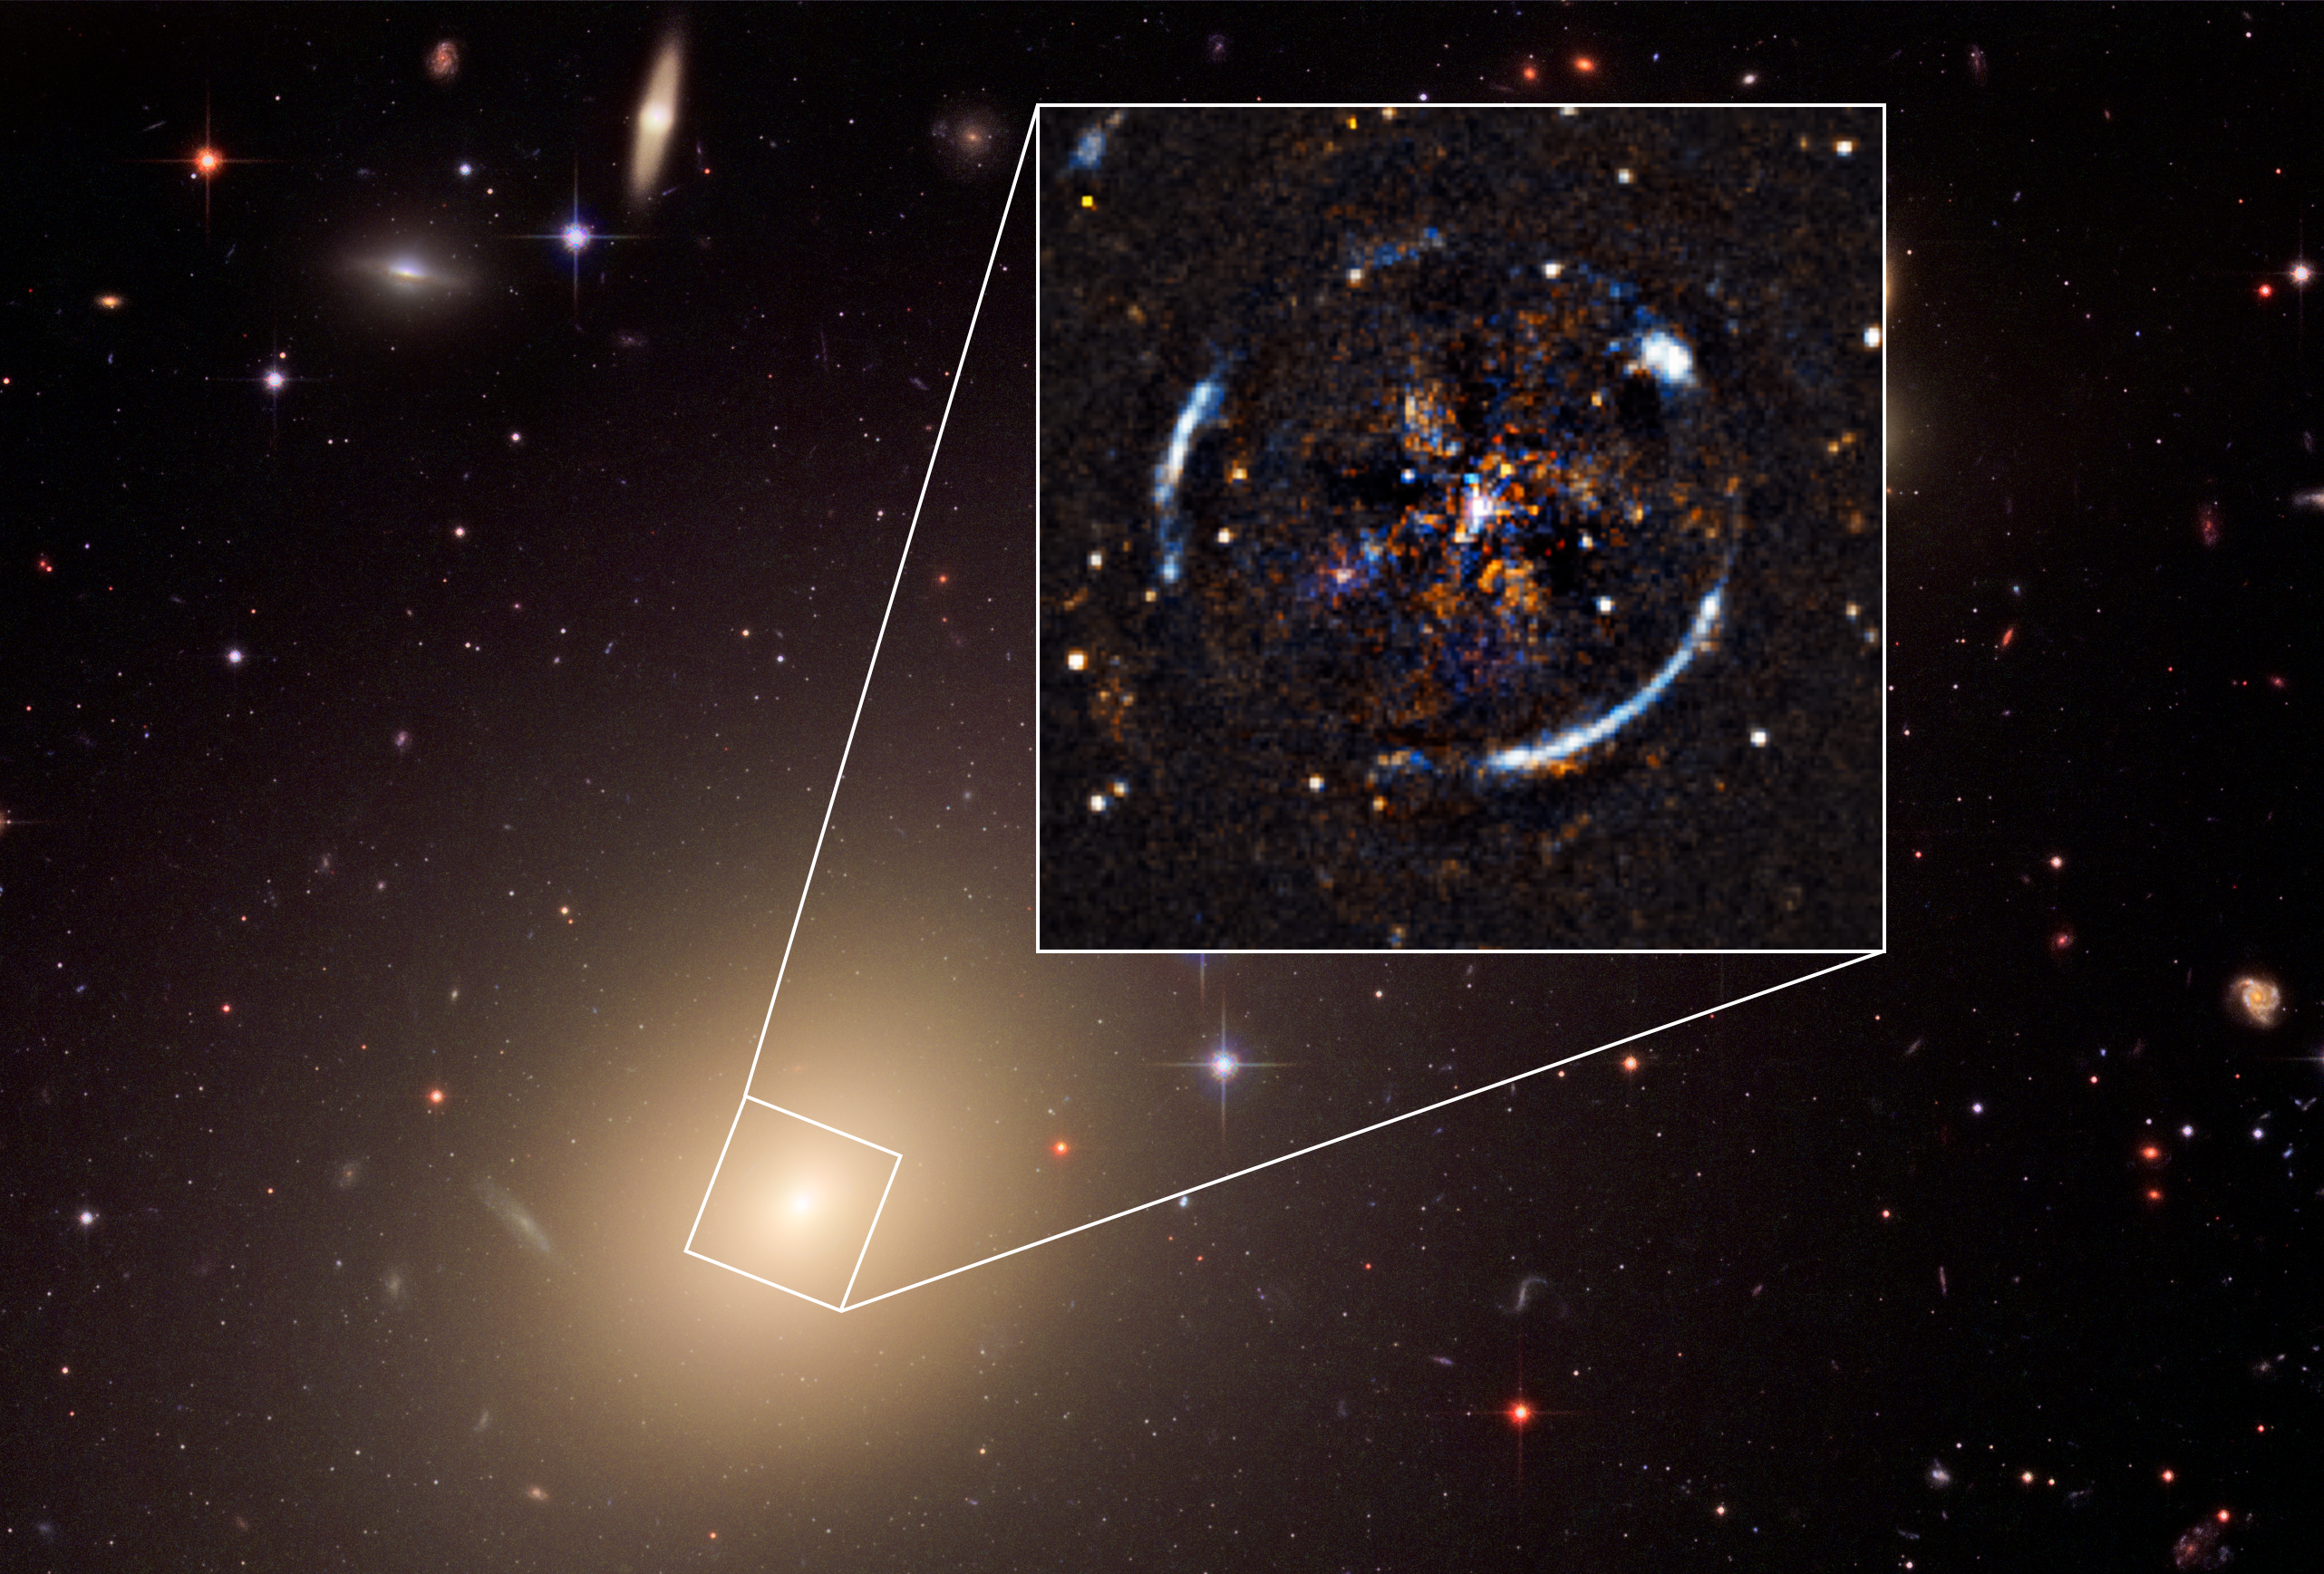

Image of ESO 325-G004

An image of the nearby galaxy ESO 325-G004, created using data collected by the NASA/ESA Hubble Space Telescope and the MUSE instrument on the ESO’ Very Large Telescope. MUSE measured the velocity of stars in ESO 325-G004 to produce the velocity dispersion map that is overlaid on top of the Hubble Space Telescope image. Knowledge of the velocities of the stars allowed the astronomers to infer the mass of ESO 325-G004. The inset shows the Einstein ring resulting from the distortion of light from a more distant source by intervening lens ESO 325-004, which becomes visible after subtraction of the foreground lens light.

Credit: ESO, ESA/Hubble, NASA